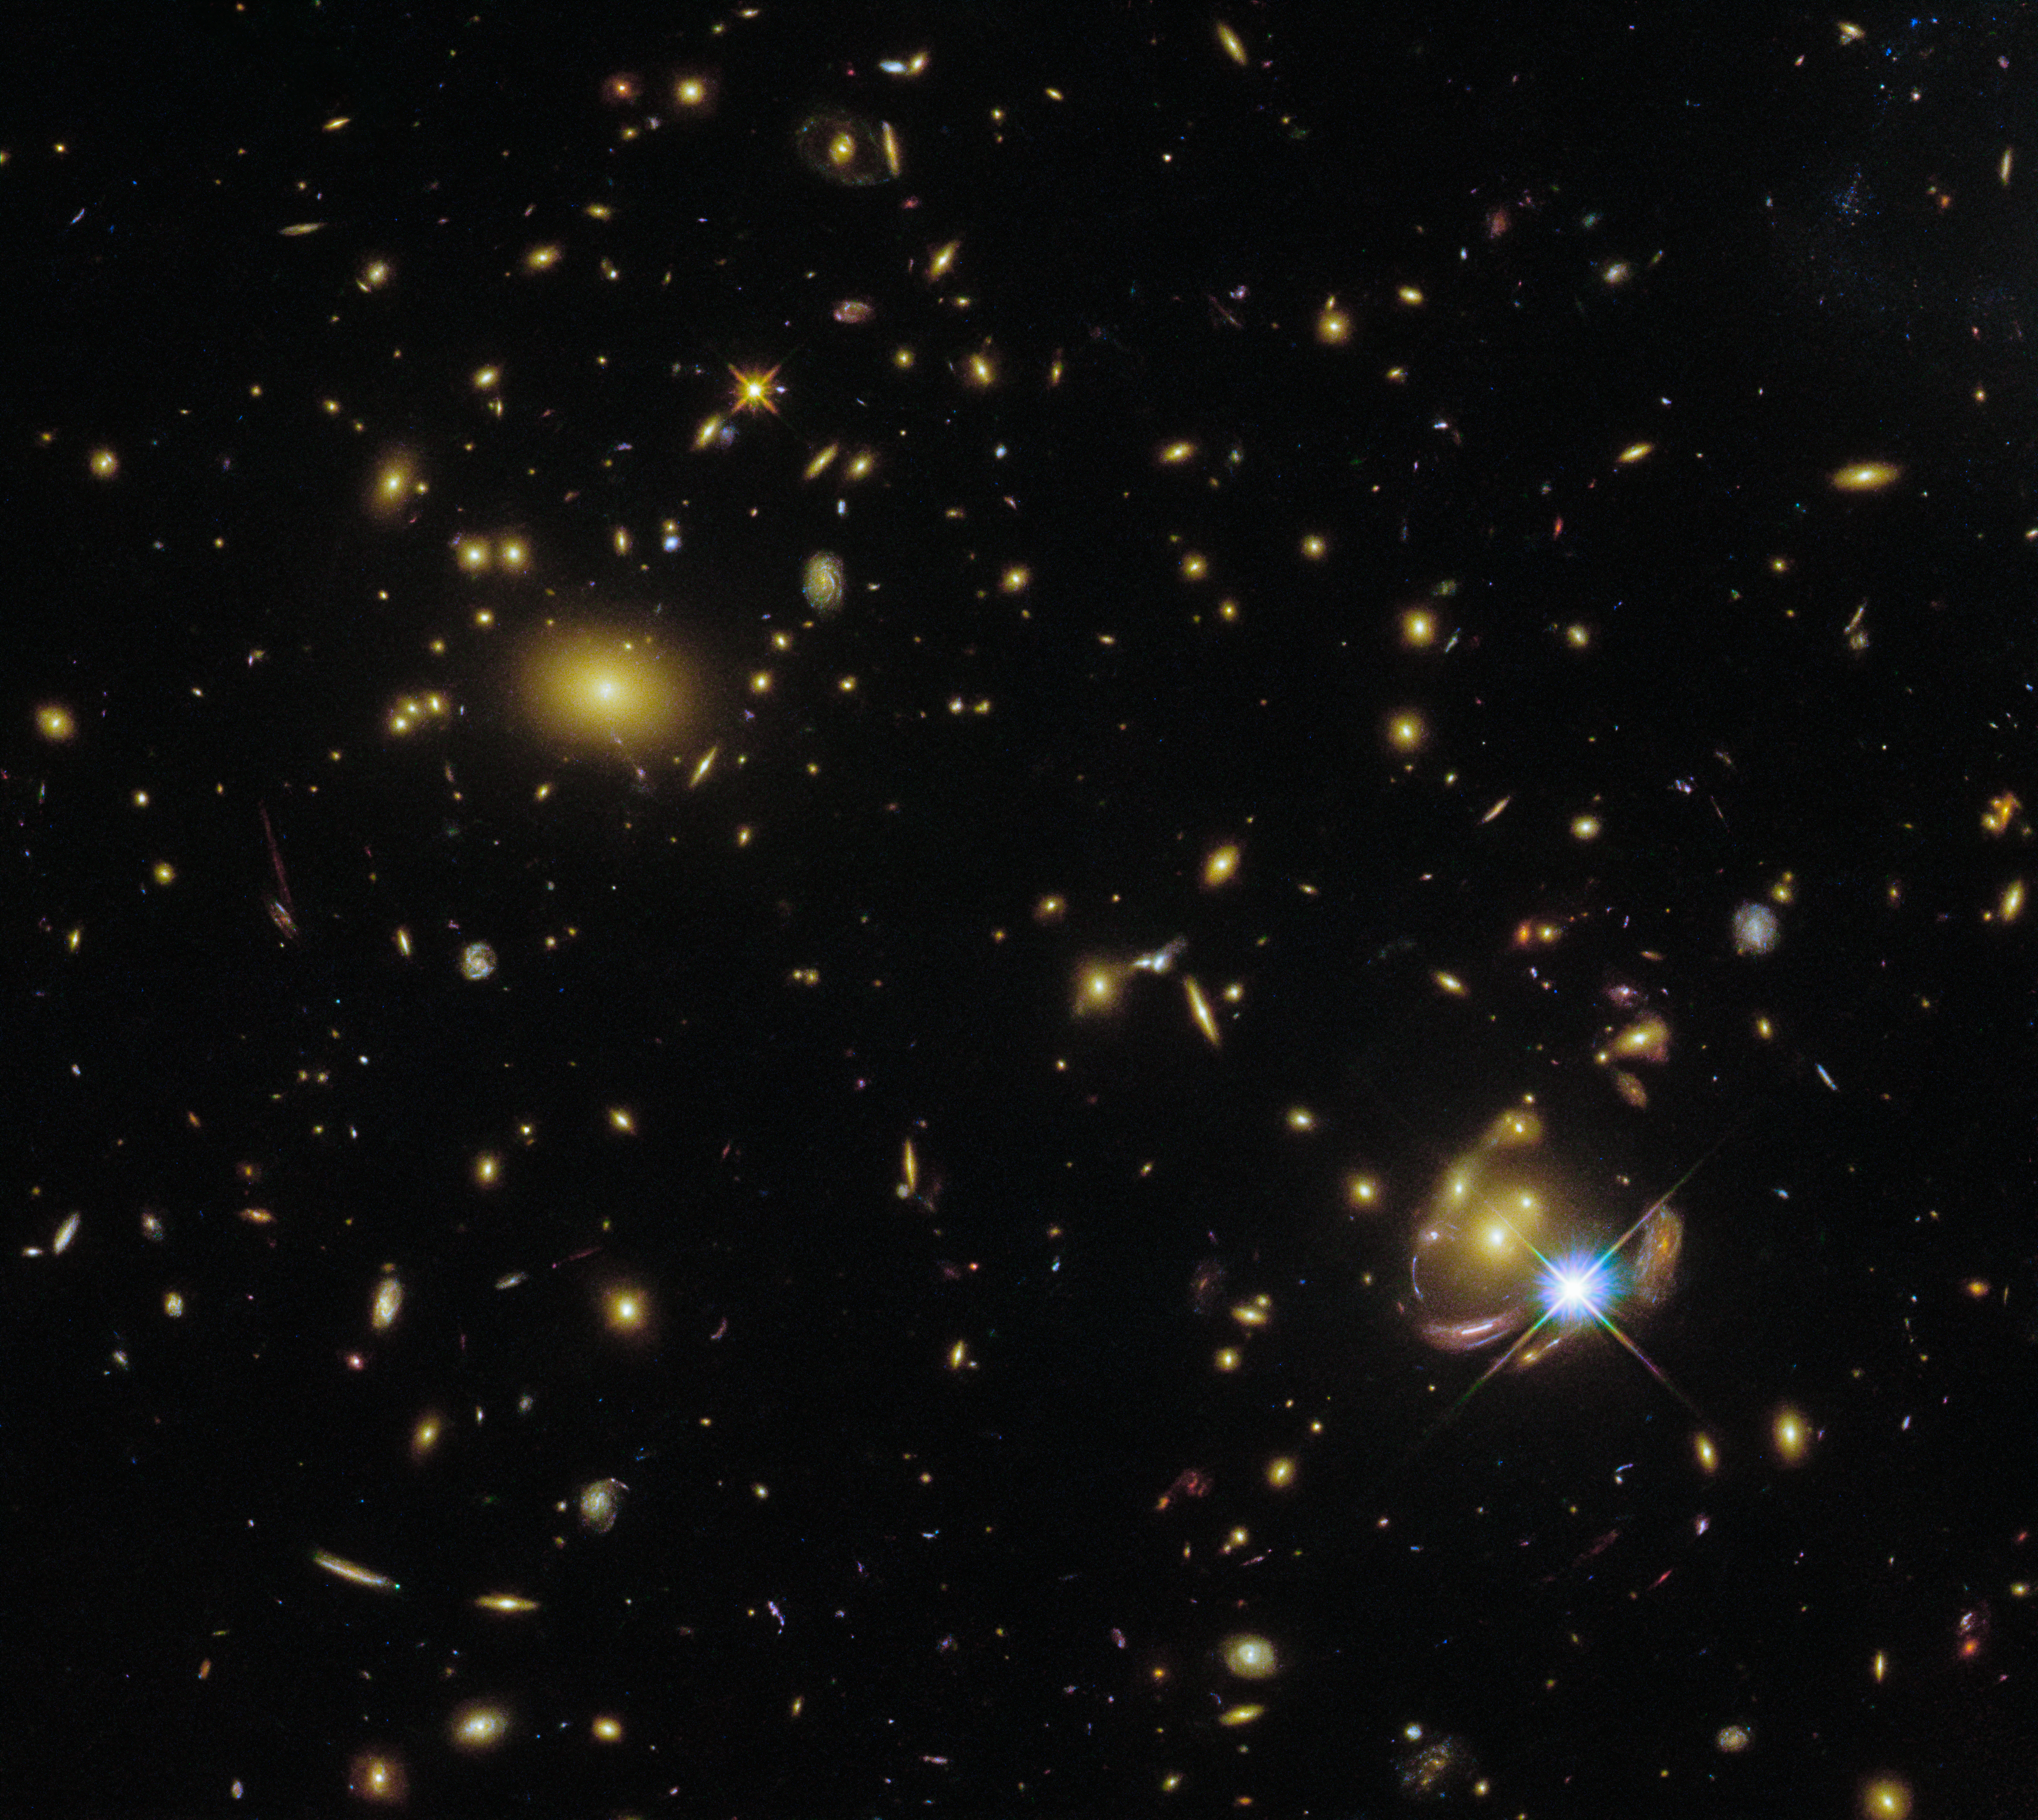

One Galaxy, Three Times

This star- and galaxy-studded image was captured by Hubble’s Wide Field Camera 3 (WFC3), using data that were collected for scientific purposes. The object of interest was a galaxy that is visible in the bottom right corner of the image, named SGAS 0033+02. What makes this particular galaxy interesting is a little unusual — it appears not just once in this image, but three times. The thrice-visible galaxy is a little difficult to spot: it appears once as a curved arc and twice more as small round dots around the star.

SGAS 0033+02’s multiple appearances in the same image are not the result of an error, but instead are due to a remarkable phenomenon known as gravitational lensing. Gravitational lensing occurs when the light from a very distant galaxy — such as SGAS 0033+02 — is curved (or ‘lensed’) by the gravity of a massive celestial object that lies in the foreground, between the distant galaxy and the Earth. SGAS 0033+02 was discovered by its namesake, the Sloan Giant Arcs Survey (SGAS), which aimed to identify highly magnified galaxies that were gravitationally lensed by foreground galaxy clusters. SGAS 0033+02 is of special interest because of its highly unusual proximity in the sky to a very bright star. The star is useful, because it can be used to calibrate and correct observations of the lensed SGAS 0033+02.

Credit: ESA/Hubble & NASA, E. Wuyts